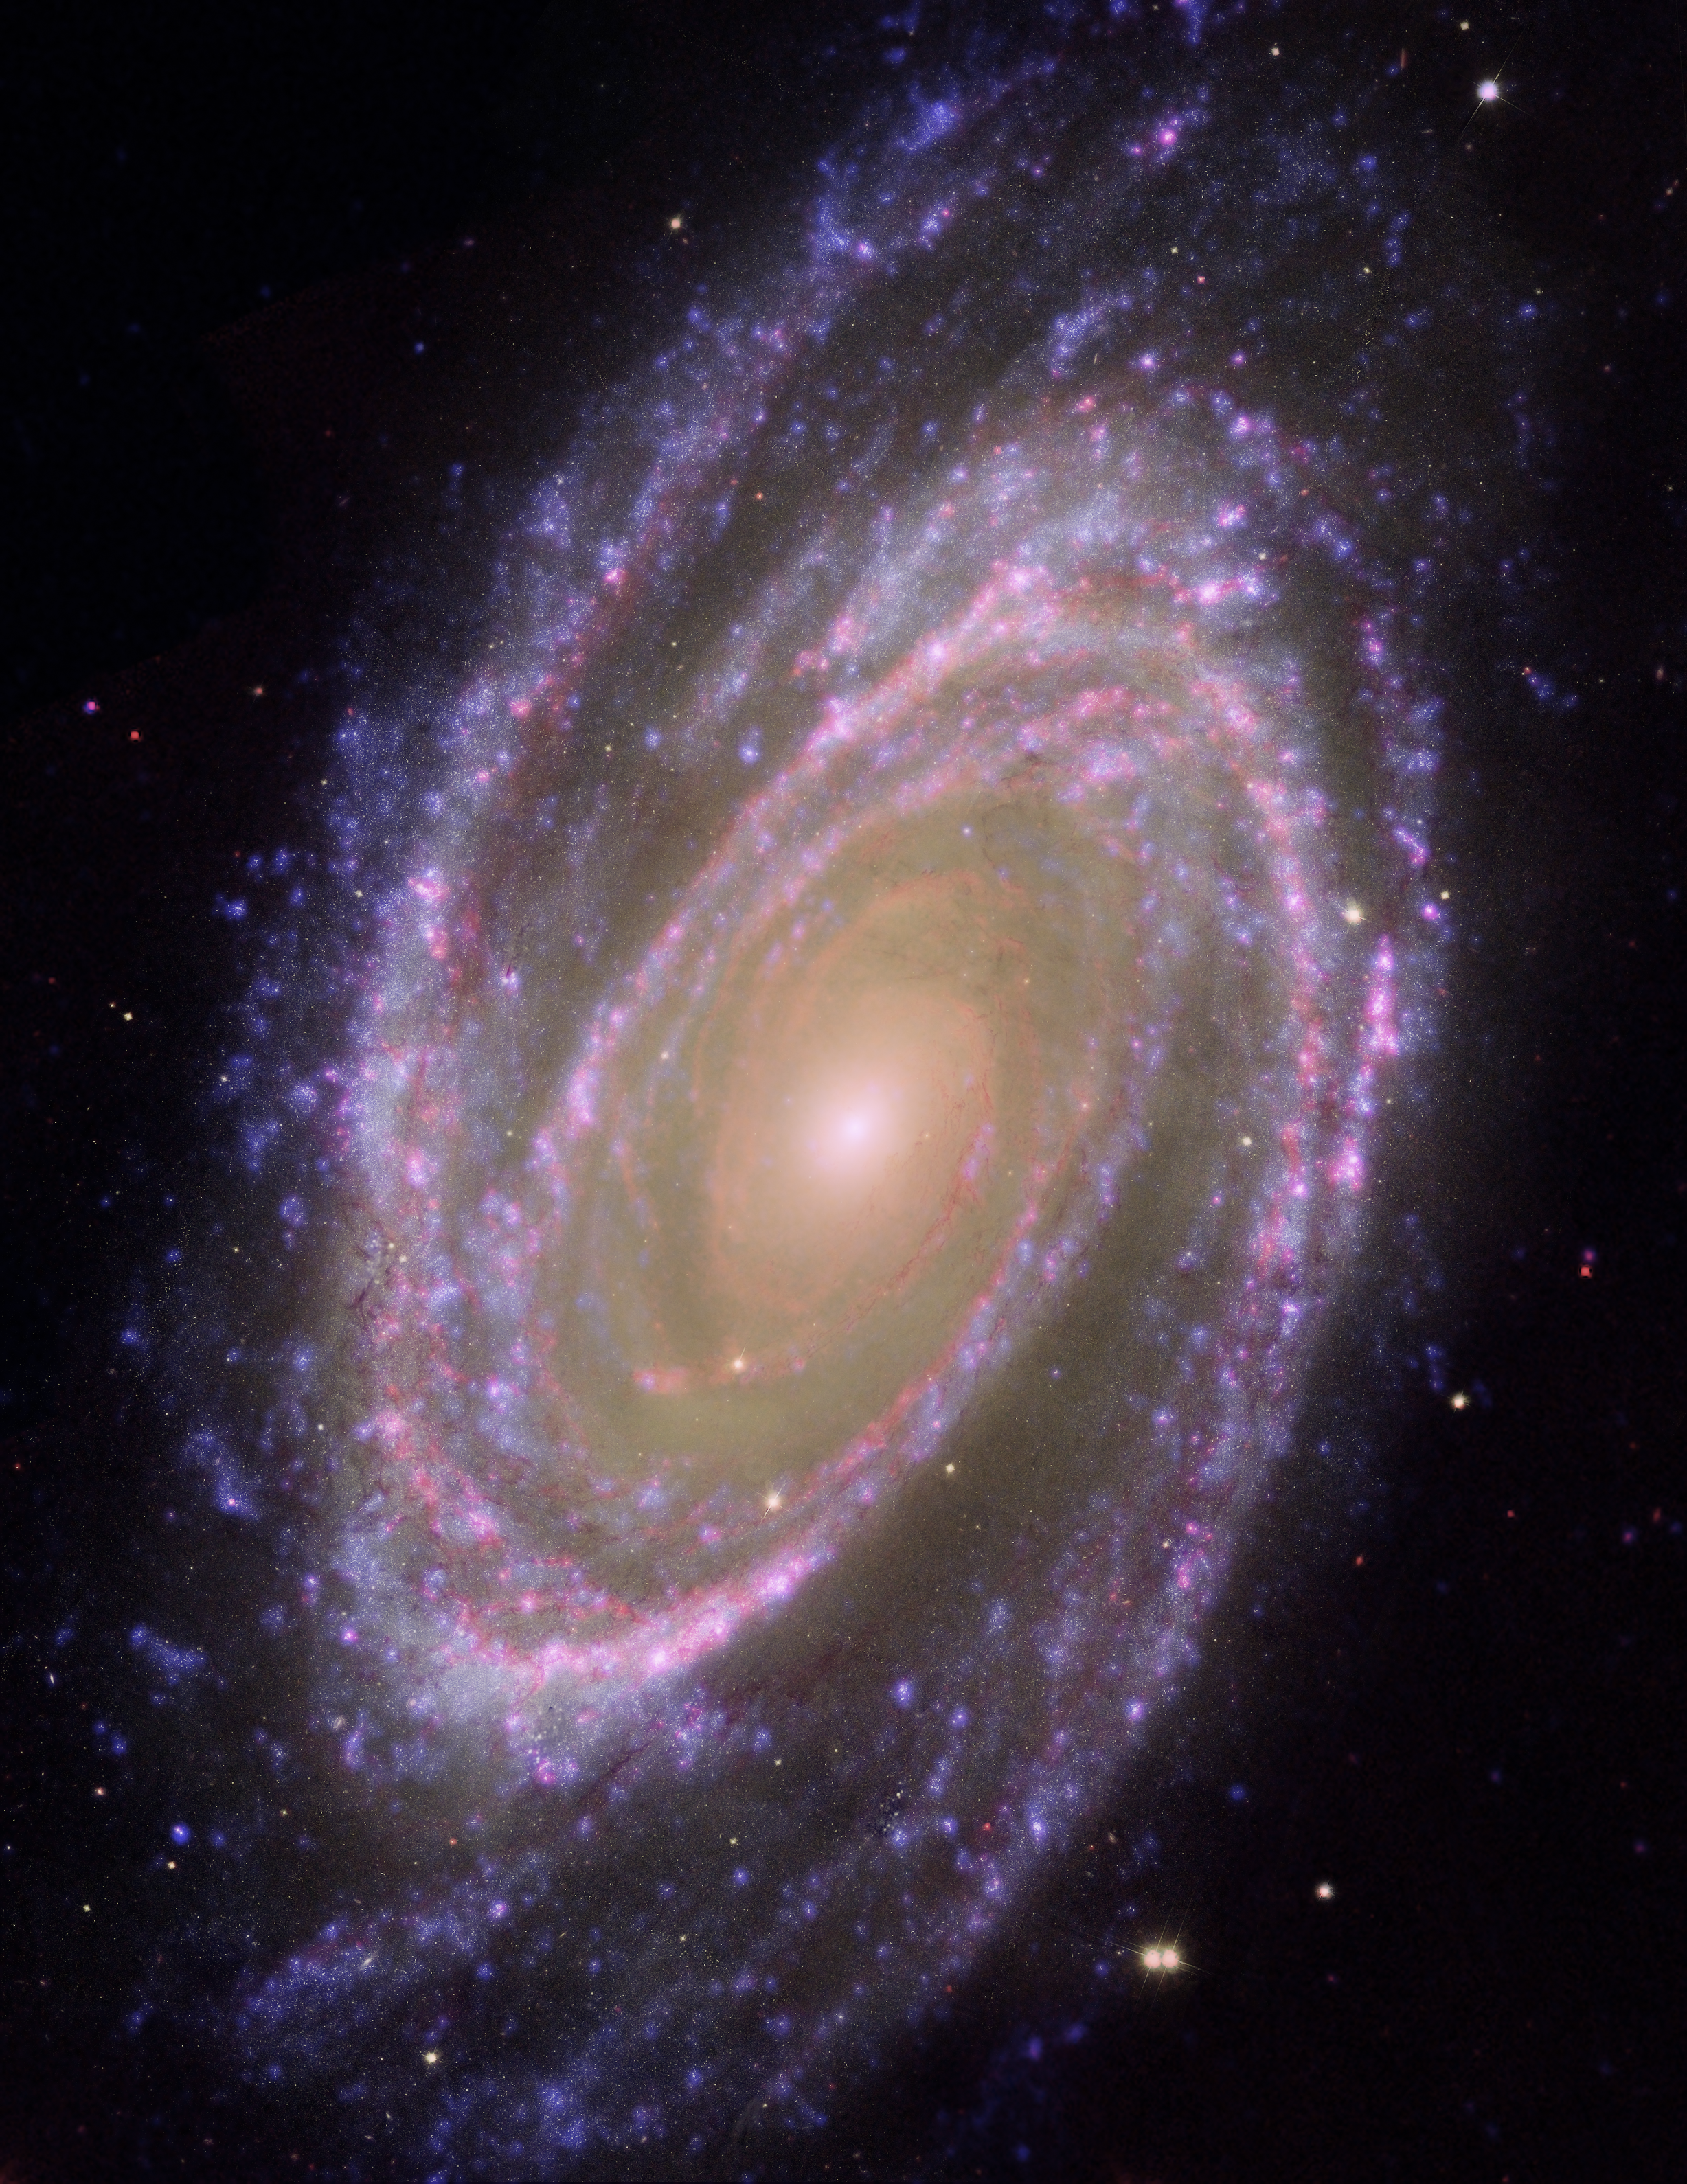

Hubble/GALEX/Spitzer Composite Image of M81

This image combines data from the Hubble Space Telescope, the Spitzer Space Telescope and the Galaxy Evolution Explorer (GALEX) missions. The GALEX ultraviolet data were from the far-UV portion of the spectrum (135 to 175 nanometres). The Spitzer infrared data were taken with the IRAC 4 detector (8 microns). The Hubble data were taken at the blue portion of the spectrum.

Credit: NASA, ESA and A. Zezas (Harvard-Smithsonian Centre for Astrophysics); GALEX data: NASA, JPL-Caltech, GALEX Team, J. Huchra et al. (Harvard-Smithsonian Centre for Astrophysics); Spitzer data: NASA/JPL/Caltech/Harvard-Smithsonian Centre for Astrophysics.